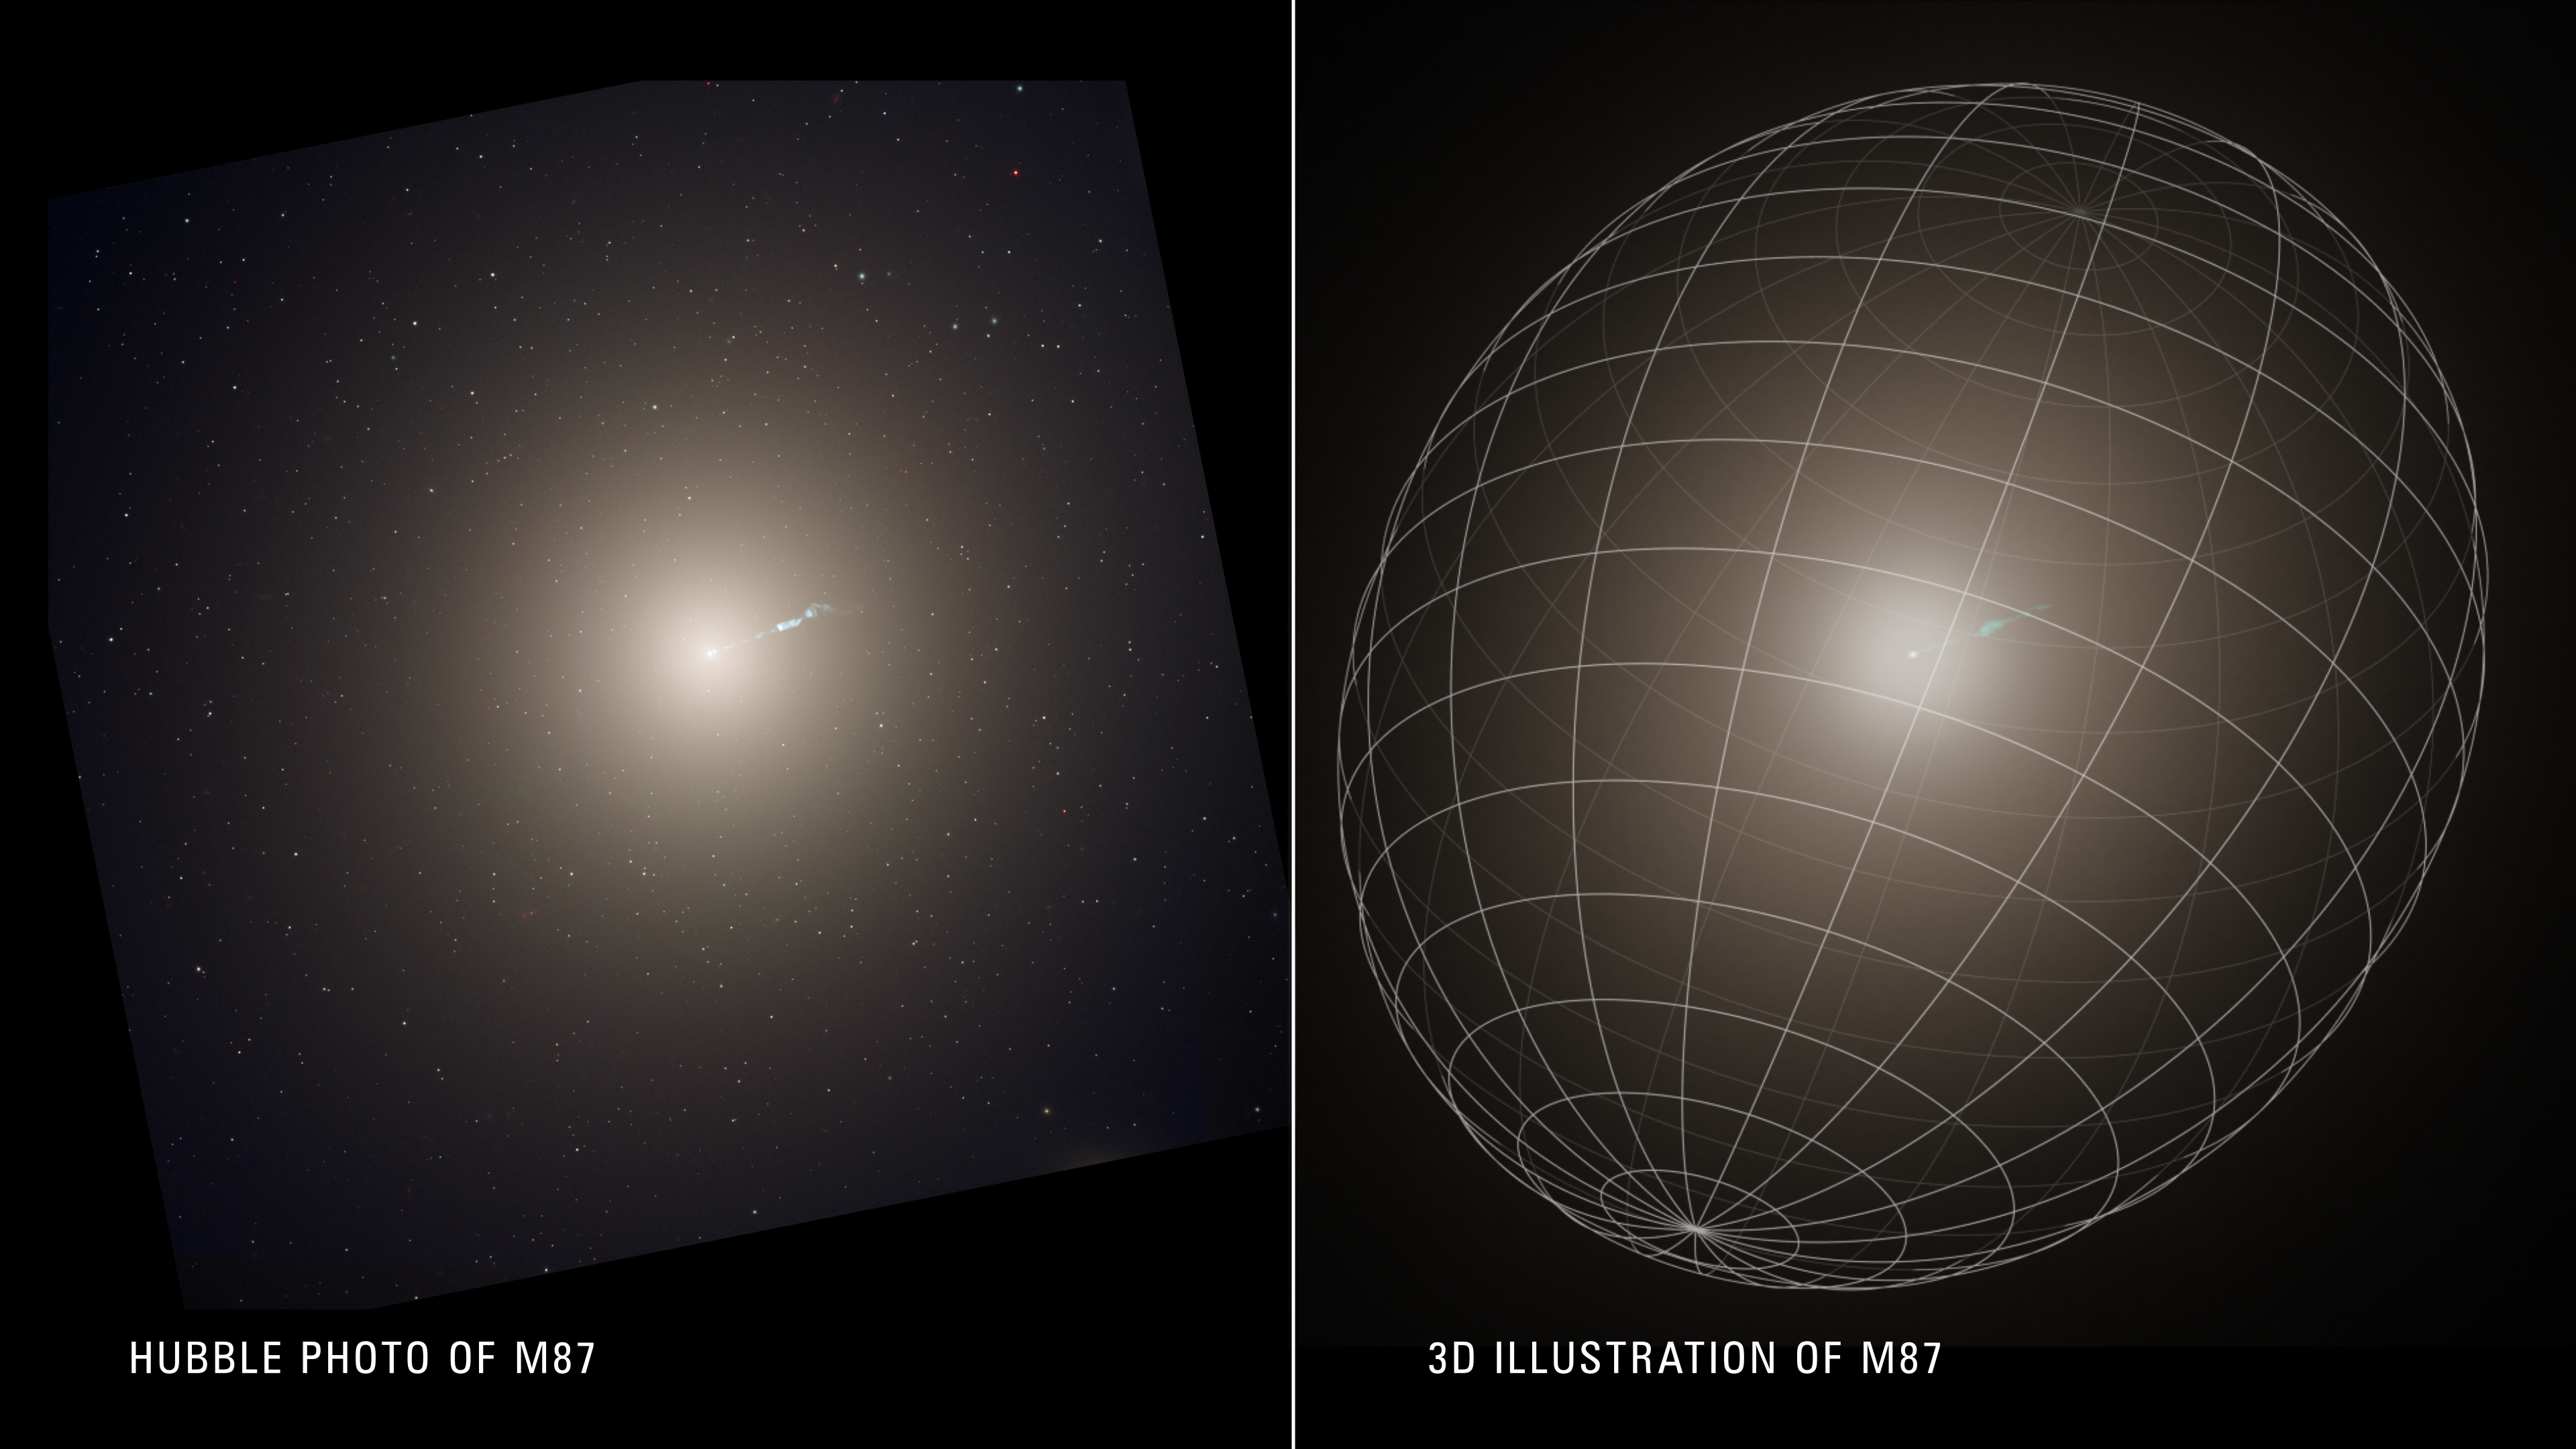

The Hubble and Keck Telescopes assemble a 3D view of a giant galaxy

A photo of the huge elliptical galaxy M87 [left] is compared to its three-dimensional shape as gleaned from meticulous observations made with the Hubble and Keck telescopes [right]. Because the galaxy is too far away for astronomers to employ stereoscopic vision, they instead followed the motion of stars around the center of M87, like bees around a hive. This created a three-dimensional view of how stars are distributed within the galaxy.

Astronomers picked one of the nearest ellipticals to Earth, M87, located 54 million light-years away in the heart of the vast Virgo cluster of galaxies. By following the motion of stars around the center of M87, like bees around a hive, they’ve measured that the galaxy is potato-shaped. It not only has a long and short axis, which defines an ellipse on a piece of graph paper, but they measured a third axis which helps define the three-dimensionality. The geometric term is: triaxial.

Credit: NASA, ESA, J. Olmsted (STScI), F. Summers (STScI)C. Ma (UC Berkeley)